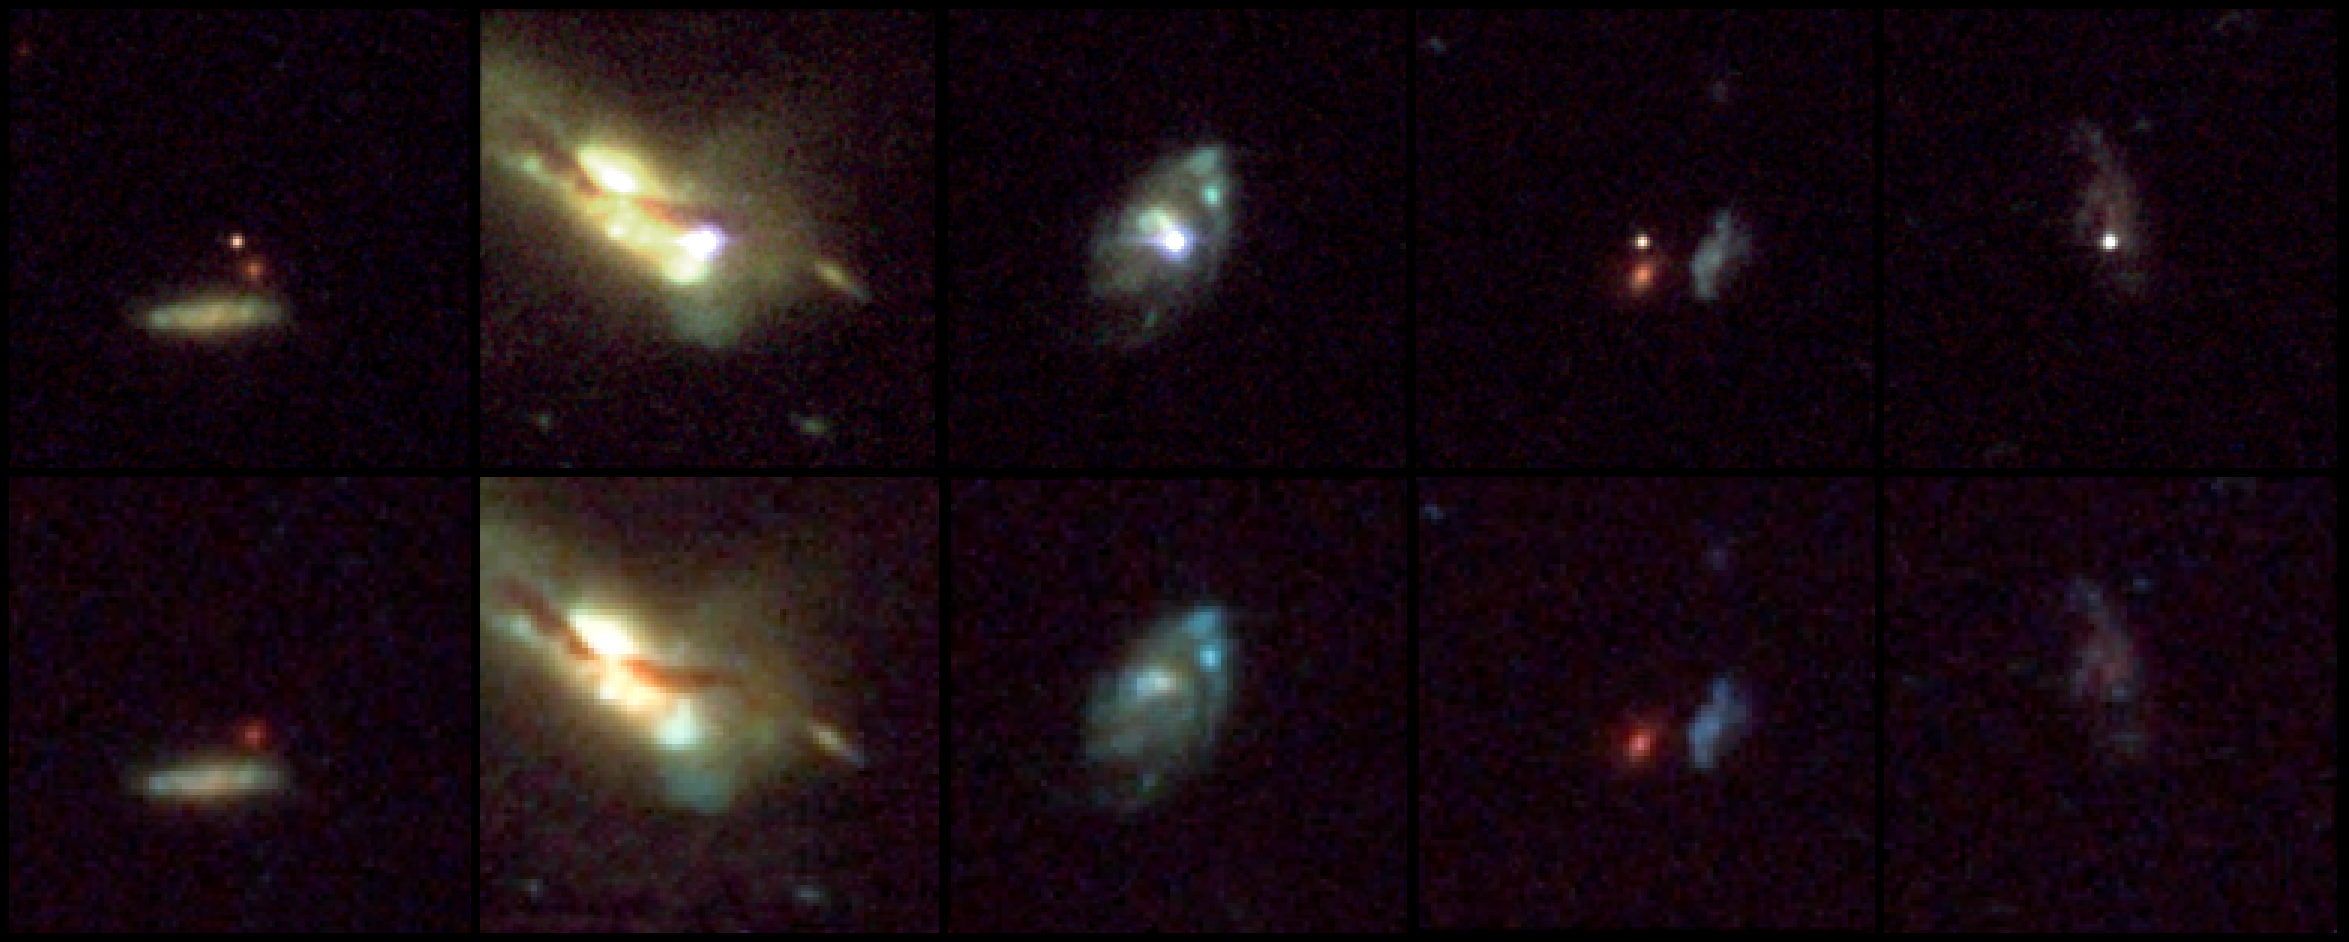

Host galaxies of distant Supernovae

These snapshots, taken by NASA/ESA Hubble Space Telescope, reveal five supernovae, or exploding stars, and their host galaxies.

The arrows in the top row of images point to the supernovae. The bottom row shows the host galaxies before or after the stars exploded. The supernovae exploded between 3.5 and 10 billion years ago.

Astronomers used the supernovae to measure the expansion rate of the universe and determine how the expansion rate is affected by the repulsive push of dark energy, a mysterious energy force that pervades space. Supernovae provide reliable measurements because their intrinsic brightness is well understood. They are therefore reliable distance markers, allowing astronomers to determine how far away they are from Earth.

Pinpointing supernovae in the faraway universe is similar to watching fireflies in your back yard. All fireflies glow with about the same brightness. So, you can judge how the fireflies are distributed in your back yard by noting their comparative faintness or brightness, depending on their distance from you.

Only Hubble can measure these supernovae because they are too distant, and therefore too faint, to be studied by the largest ground-based telescopes.

These Hubble observations show for the first time that dark energy has been a present force for most of the universe's history. A spectral analysis also shows that the supernovae used to measure the universe's expansion rate today look remarkably similar to those that exploded nine billion years ago and are just now seen by Hubble.

These latest results are based on an analysis of the 24 most distant known supernovae, most of them discovered within the last three years by the Higher-z SN Search Team. The images were taken between 2003 and 2005 with Hubble's Advanced Camera for Surveys.

Credit: NASA, ESA, and A. Riess (STScI)